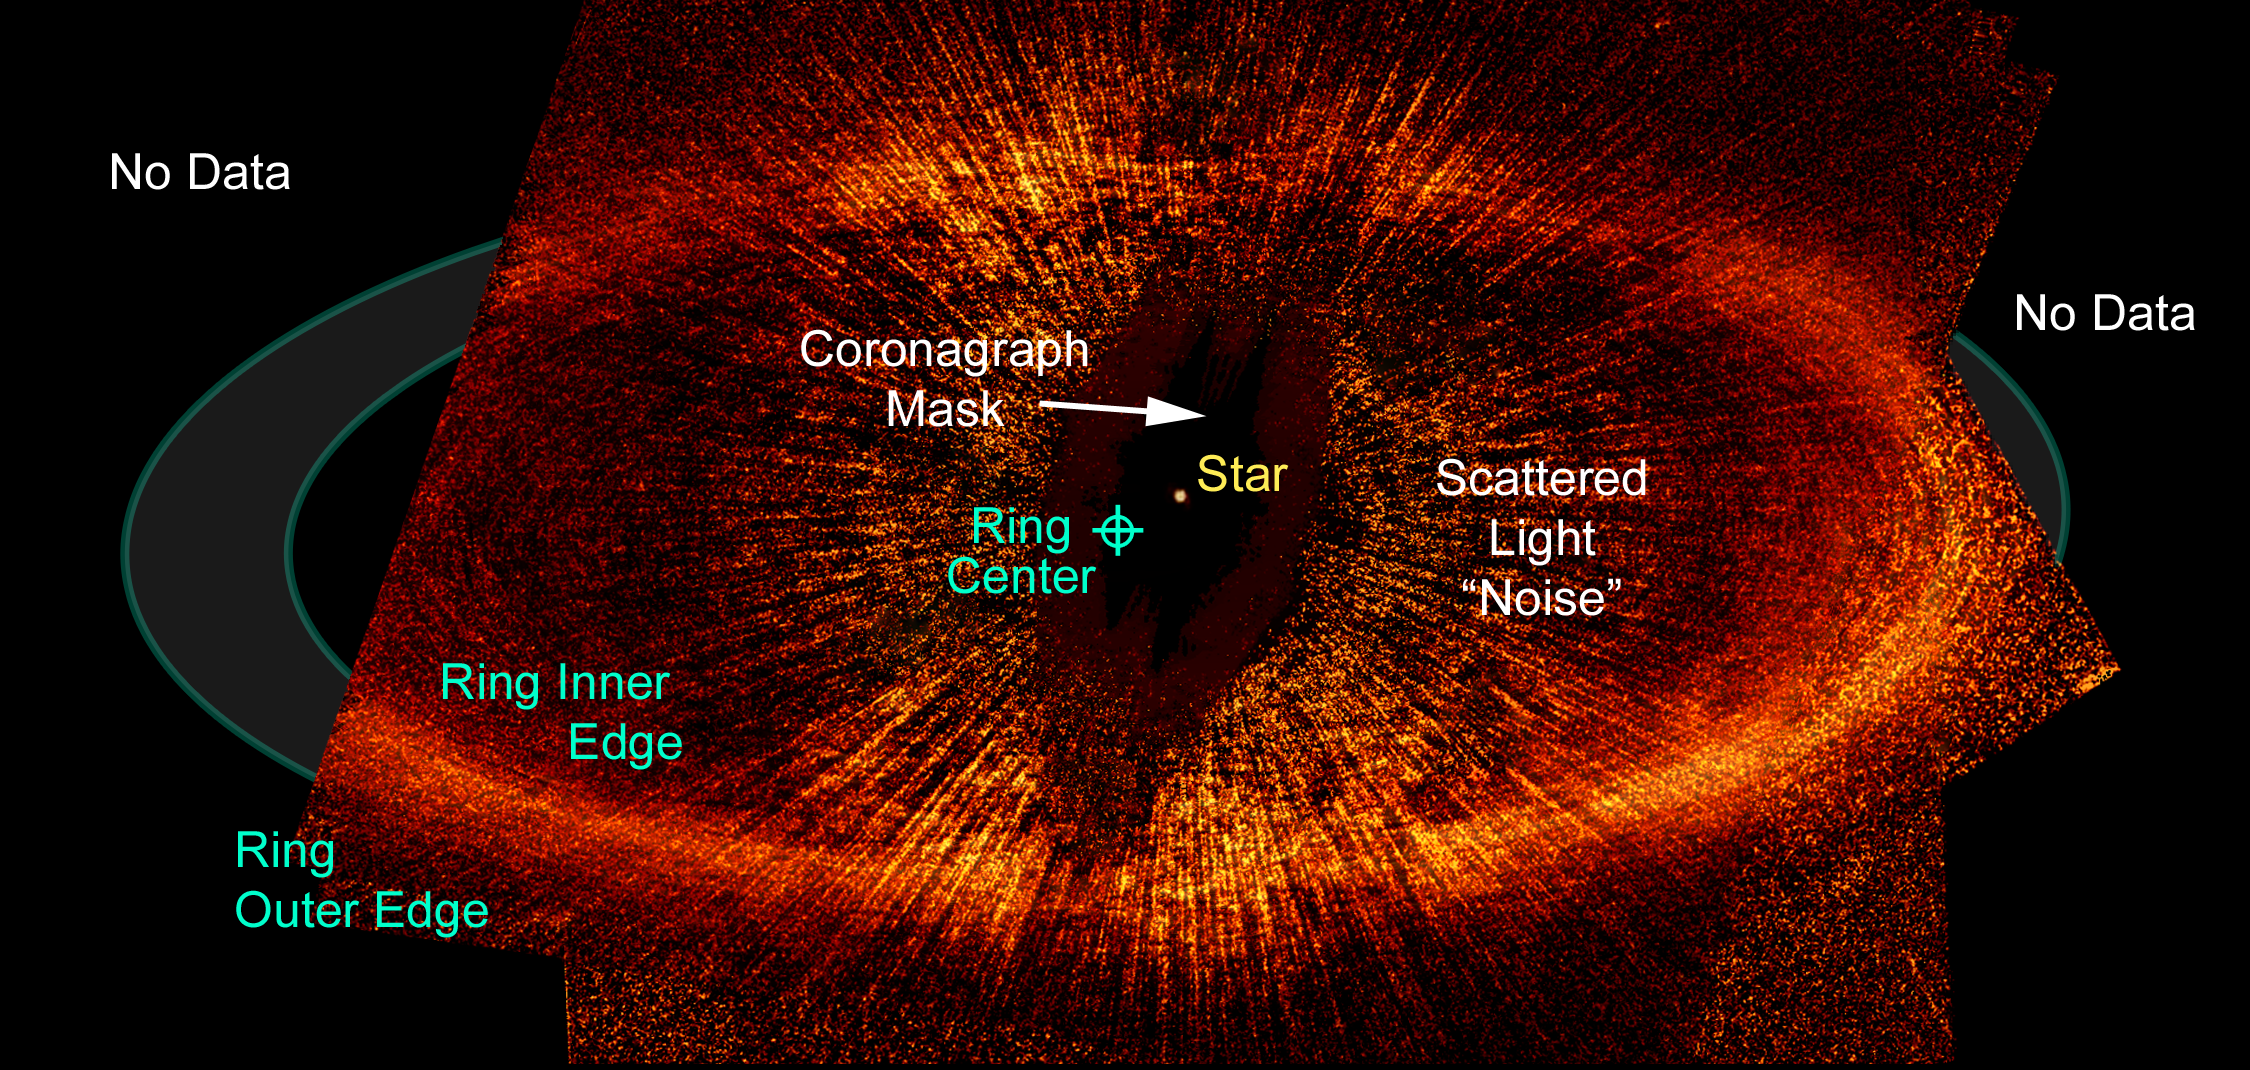

Debris ring around a star: annotated

This view points out important features in the image, such as the ring's inner and outer edges. Astronomers used the Advanced Camera for Surveys' (ACS) coronagraph aboard Hubble to block out the light from the bright star so they could see the faint ring. Despite the coronagraph, some light from the star is still visible in this image, as can be seen in the wagon wheel-like spokes that form an inner ring around Fomalhaut [labeled "scattered light 'noise'"].

Credit: NASA, ESA, P. Kalas and J. Graham (University of California, Berkeley), and M. Clampin (NASA's Goddard Space Flight Center)